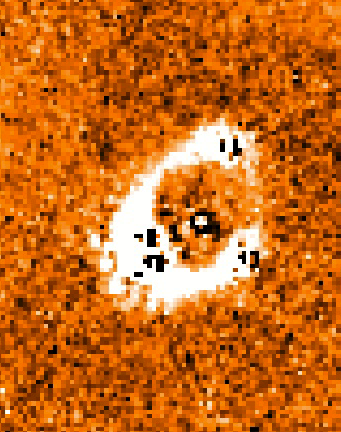

Gravitational Lens and Quasar PG1115+080

In this NICMOS image, the four quasar images and the lens galaxy have been subtracted, revealing a nearly complete ring of infrared light. This ring is the stretched and amplified starlight of the galaxy that contains the quasar, some 8 billion light years away. (NASA/Space Telescope Science Institute).

Credit: Christopher D. Impey (University of Arizona)